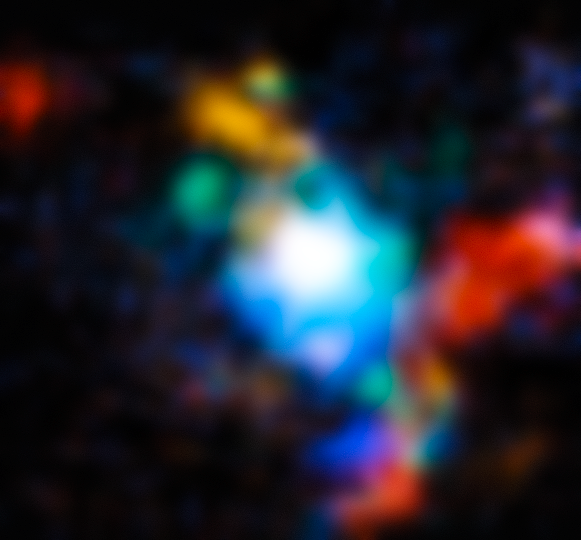

Webb’s View of the Extremely Red Quasar SDSS J165202.64+172852.3

The quasar SDSS J165202.64+172852.3 is depicted here by the NASA/ESA/CSA James Webb Space Telescope to demonstrate the distribution of gas around the object.

The quasar is an “extremely red” quasar that exists in the very early Universe, 11.5 billion years ago.

This image is composed of four narrow-band images made from the Webb NIRSpec instrument’s integral-field spectroscopy mode.

Each colour illustrates the relative speed of ionised oxygen gas across the cluster. The redder the colour the faster gas is moving away from our line of sight with the quasar, while the bluer the colour the faster it's moving away from the quasar toward us. The colour green indicates that the gas is steady in our line of light in comparison to the quasar.

Credit: ESA/Webb, NASA & CSA, D. Wylezalek, A. Vayner & the Q3D Team